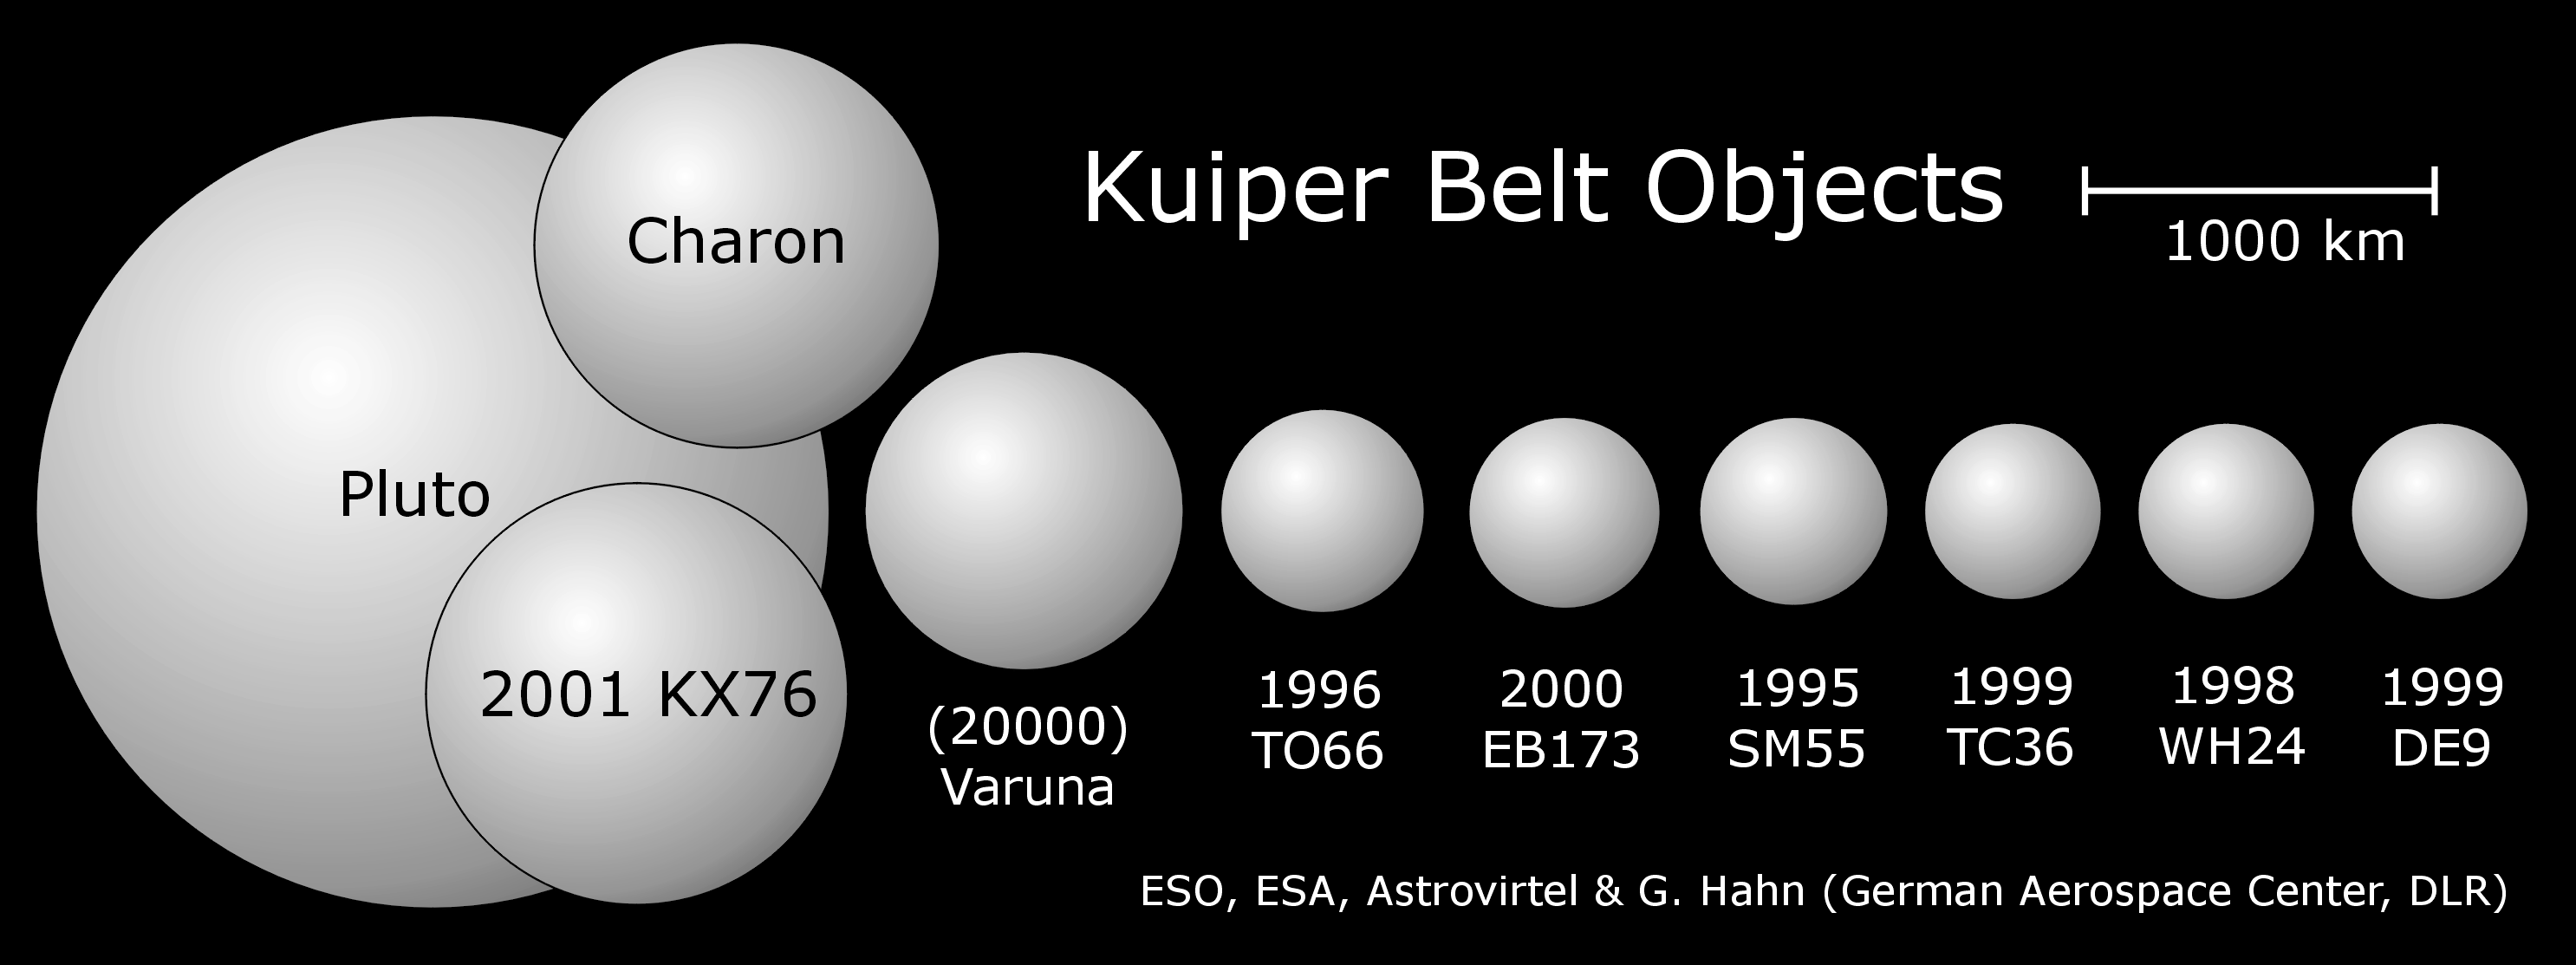

Relative sizes of the largest known Kuiper Belt

In this schematic diagram the relative sizes of the largest Kuiper Belt Objects (KBO) are illustrated. The newly discovered object, 2001 KX76 (diameter about 1200 km), is the largest known KBO and is even larger than Pluto's moon, Charon. For comparison Pluto's diameter is about 2300 km.

Credit: ESA, ESO, Astrovirtel & Gerhard Hahn (German Aerospace Center, DLR)